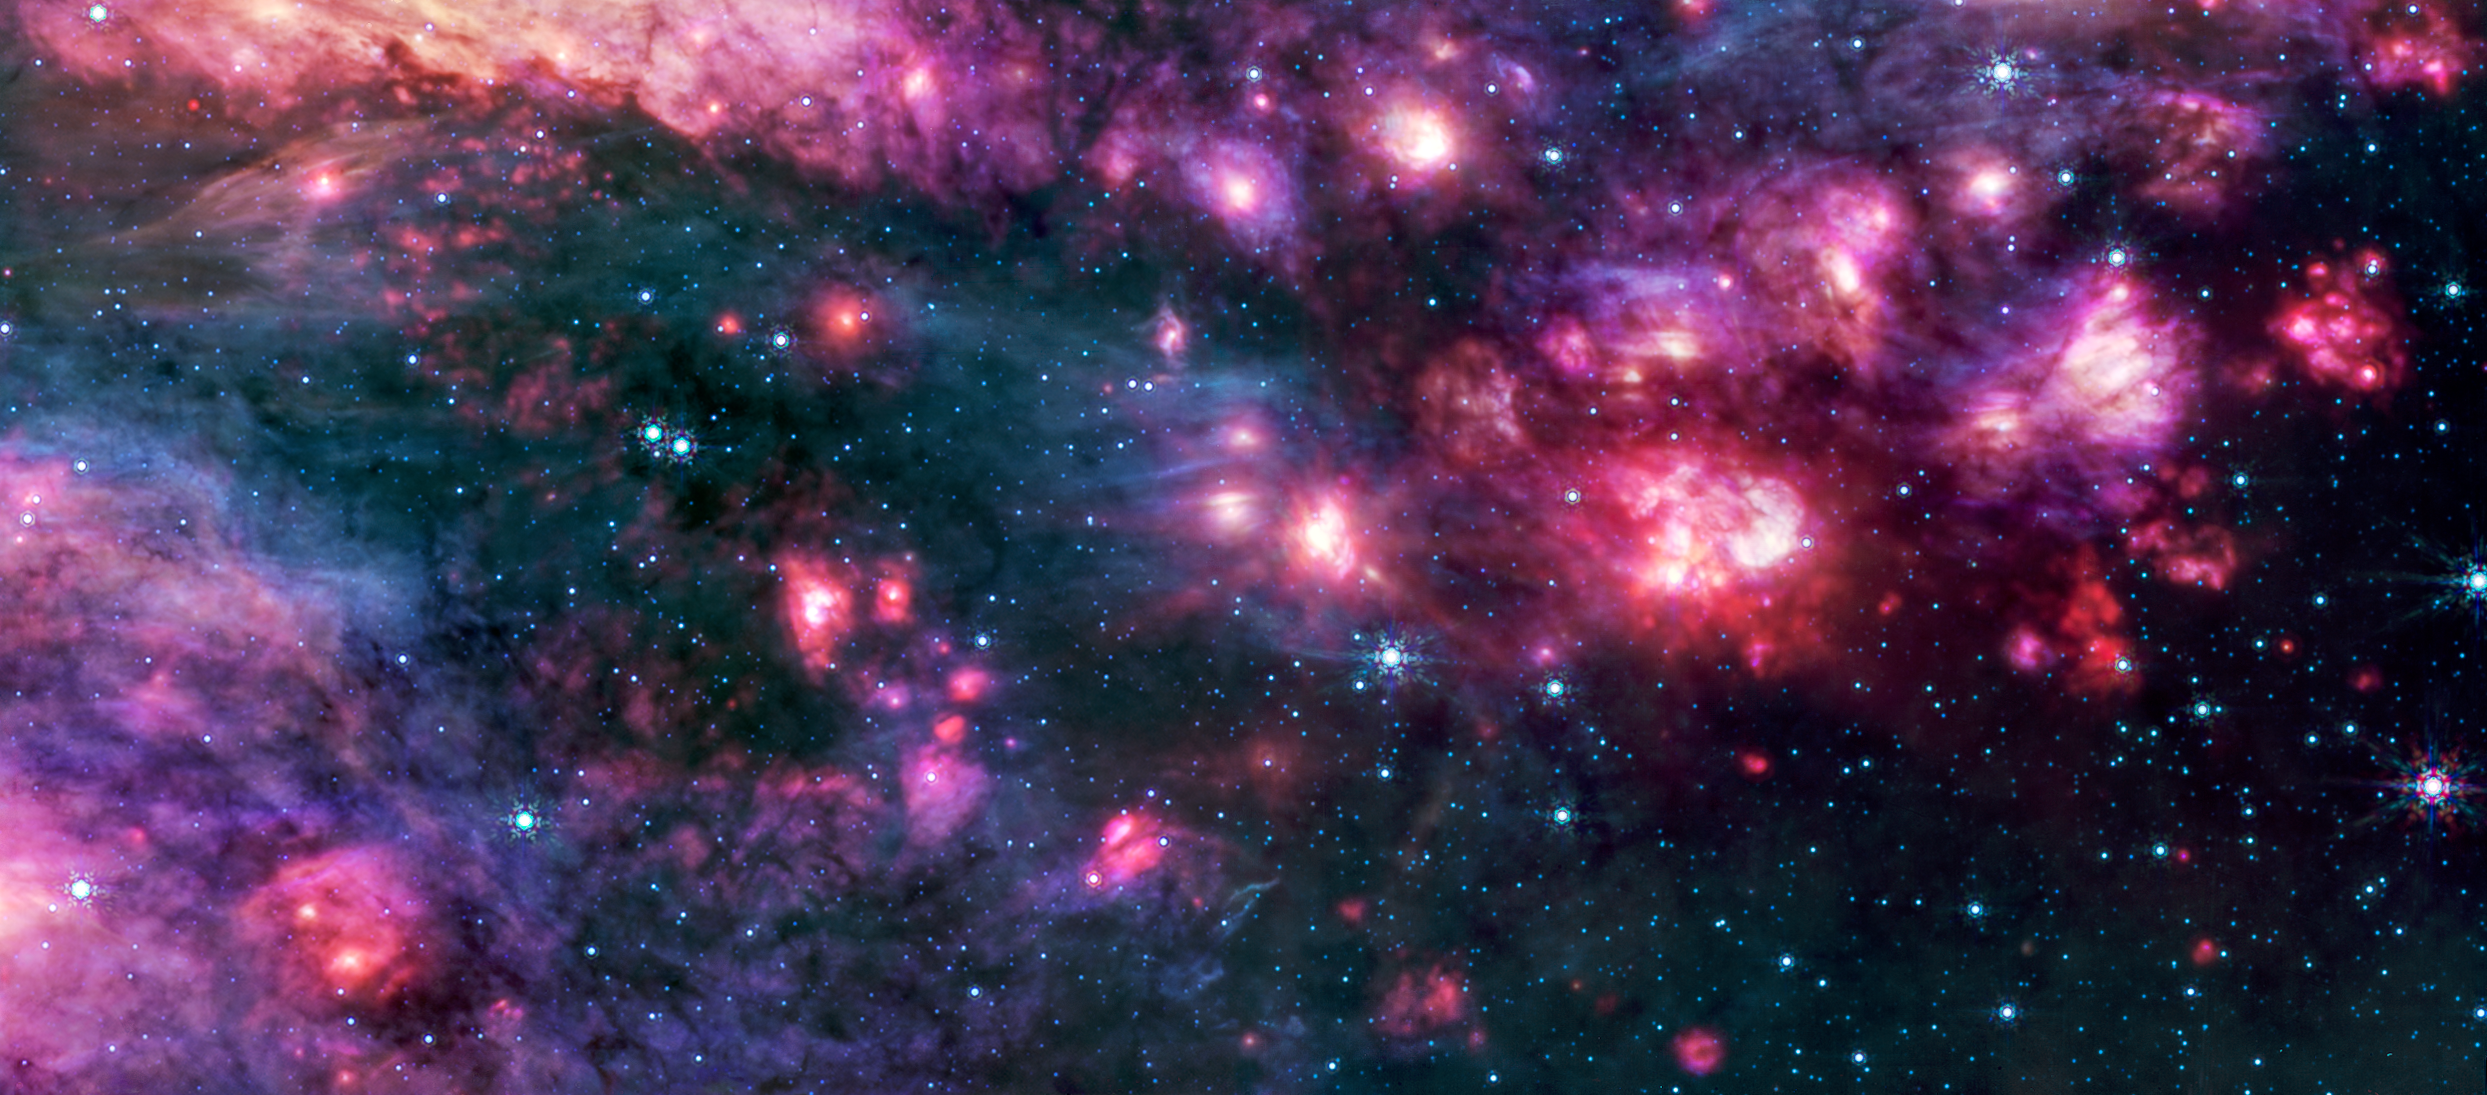

Sagittarius B2 (MIRI image)

Webb’s MIRI (Mid-Infrared Instrument) shows the Sagittarius B2 (Sgr B2) region in mid-infrared light, with warm dust glowing brightly. To the right is one clump of clouds that captured astronomers’ attention. It is redder than the rest of the clouds in the image and corresponds to an area that other telescopes have shown to be one of the most molecularly rich regions known. Additional analysis of this intriguing region could yield important insights into why Sgr B2 is so much more productive in making stars than the rest of the galactic centre.

Only the brightest stars in this region emit mid-infrared light that can be picked up by Webb’s MIRI instrument, which is why this image has so many fewer stars than that captured by Webb’s NIRCam (Near-Infrared Camera). The darkest areas of the image are not empty space but areas where cosmic dust and gas are so dense that light cannot penetrate them to reach the telescope.

Credit: NASA, ESA, CSA, STScI, A. Ginsburg (University of Florida), N. Budaiev (University of Florida), T. Yoo (University of Florida). Image processing: A. Pagan (STScI)